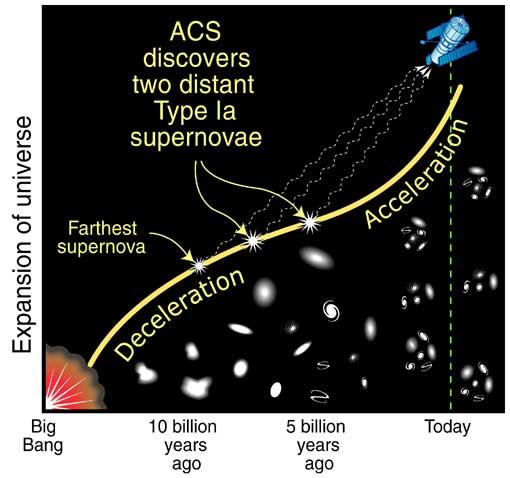

Expansion of the Universe over time

Using the ACS (Advanced Camera for Surveys) astronomers have discovered two distant Type Ia supernovae. The discovery will contribute to our understanding of the expansion of the Universe over time.

Credit: NASA/ESA and A. Feild (STScI)